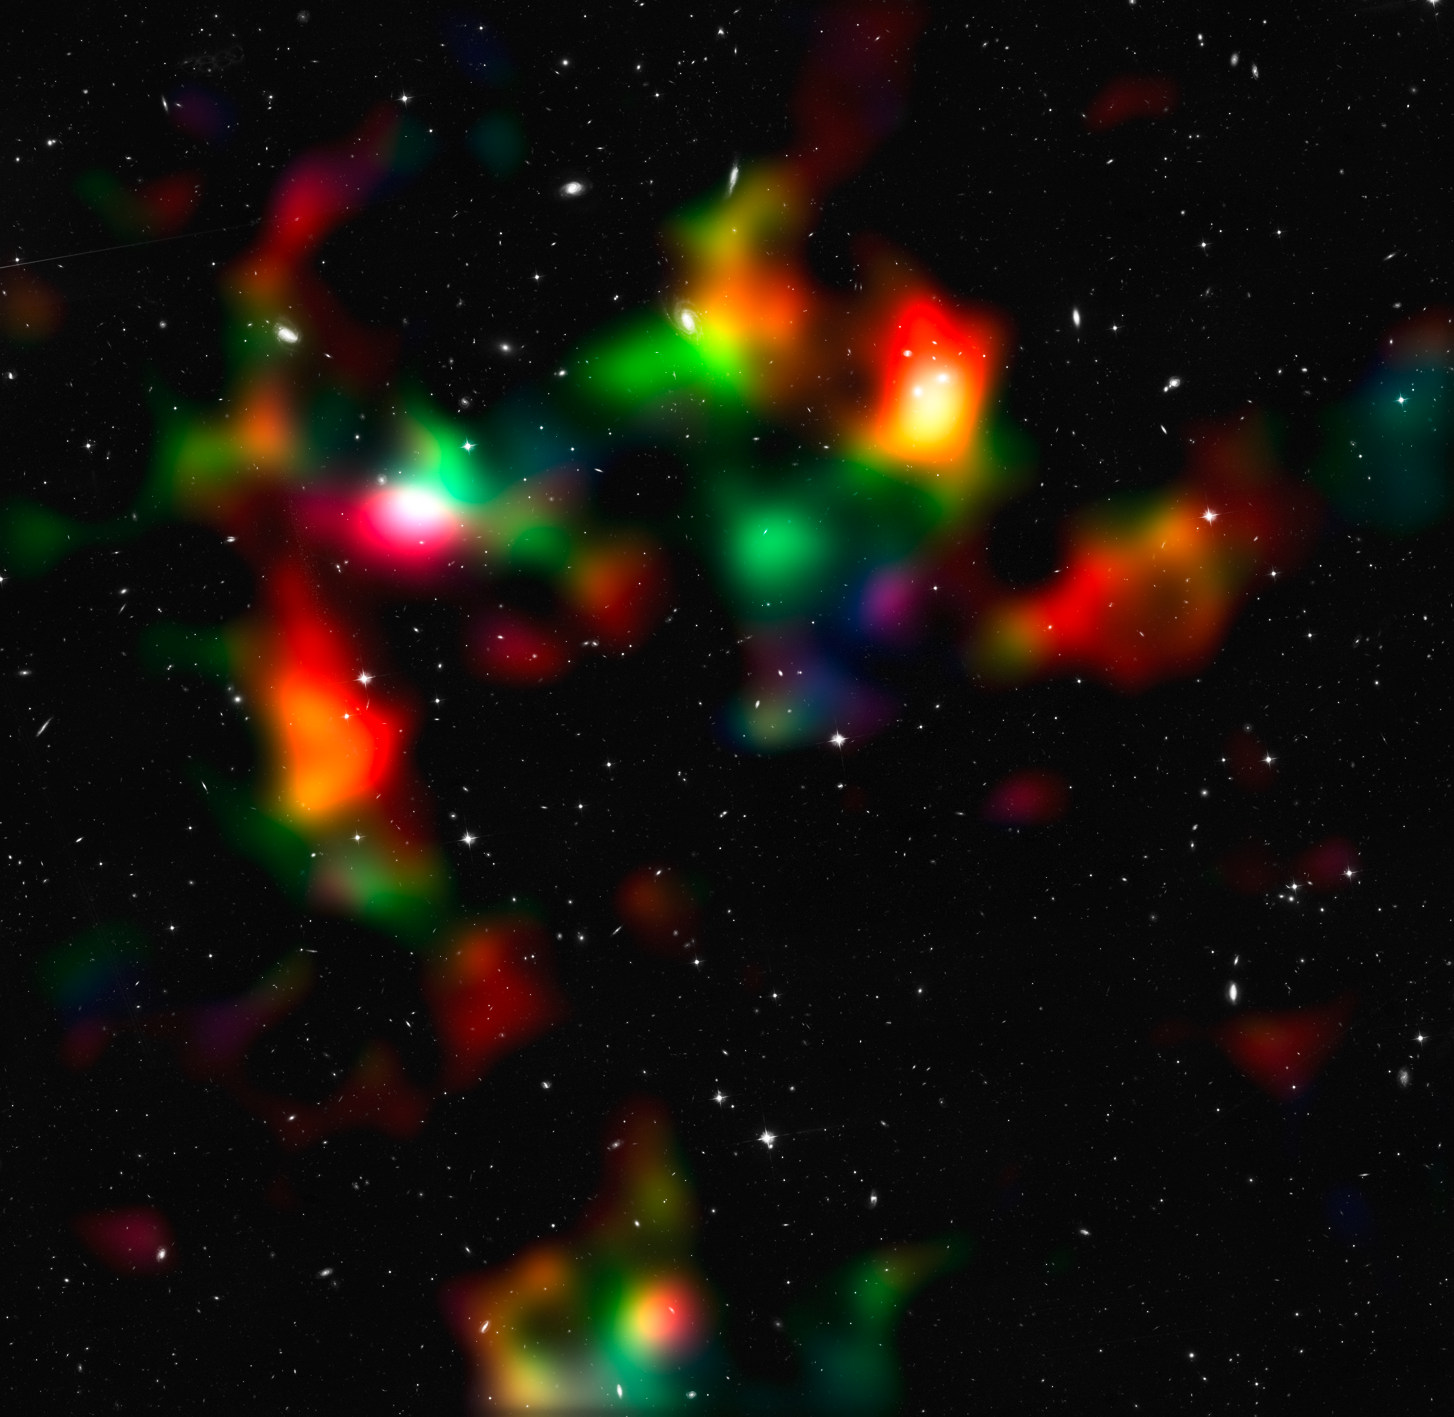

Mass distribution in the COSMOS field

This image shows a smoothed reconstruction of the total (mostly dark) matter distribution in the COSMOS field, created from data taken by the NASA/ESA Hubble Space Telescope and ground-based telescopes. It was inferred from the weak gravitational lensing distortions that are imprinted onto the shapes of background galaxies. The colour coding indicates the distance of the foreground mass concentrations as gathered from the weak lensing effect. Structures shown in white, cyan, and green are typically closer to us than those indicated in orange and red. To improve the resolution of the map, data from galaxies both with and without redshift information were used.

The new study presents the most comprehensive analysis of data from the COSMOS survey. The researchers have, for the first time ever, used Hubble and the natural "weak lenses" in space to characterise the accelerated expansion of the Universe.

Credit: NASA, ESA, P. Simon (University of Bonn) and T. Schrabback (Leiden Observatory)